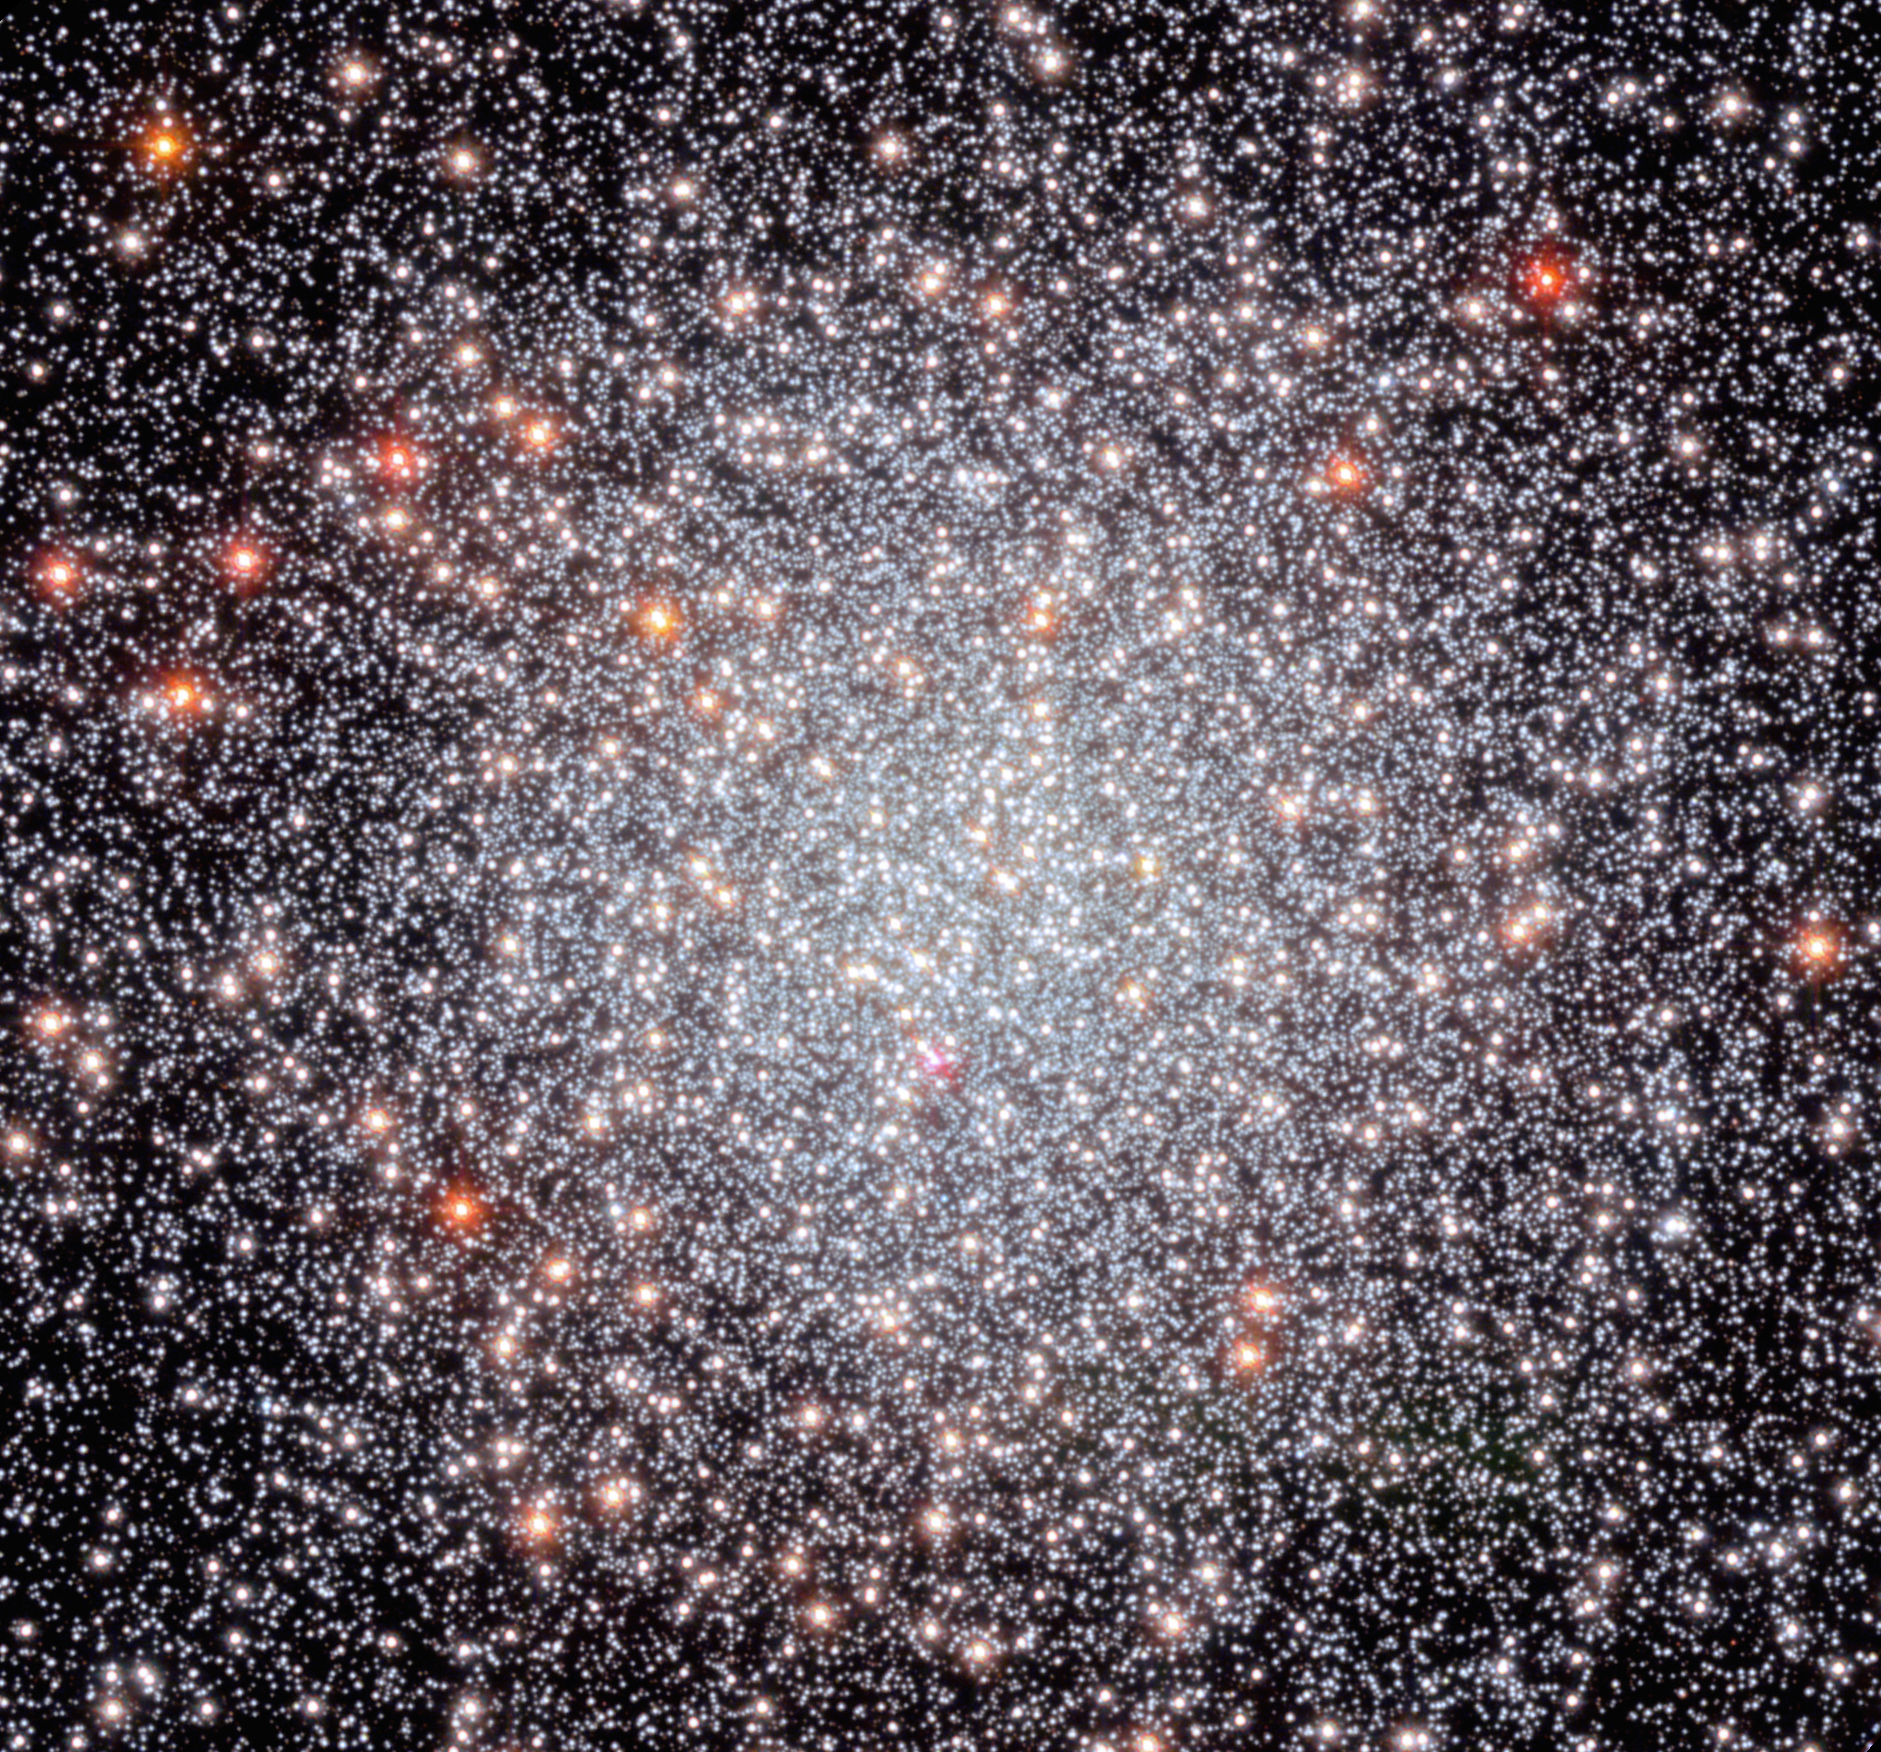

Hubble’s view of NGC 6440

The stars of globular cluster NGC 6440 shine brightly in this 2022 NASA/ESA Hubble Space Telescope image.

Globular clusters like NGC 6440 are roughly spherical, tightly packed, collections of old stars bound together by gravity. They can be found throughout galaxies, but often live on the outskirts. They hold hundreds of thousands to millions of stars that are on average about one light-year apart, but they can be as close together as the size of our Solar System.

The data used to create this image came from five different Hubble observing programmes, four of which focused on the properties of pulsars. A pulsar is a highly magnetised, rotating neutron star that emits a beam of electromagnetic radiation from its magnetic poles. To us, that beam appears as a short burst or pulse as the star rotates. Pulsars spin extremely fast. Astronomers have clocked the fastest pulsars at more than 716 rotations per second, but a pulsar could theoretically rotate as fast as 1500 rotations per second before slowly losing energy or breaking apart.

Credit: NASA, ESA, C. Pallanca and F. Ferraro (Universita Di Bologna), and M. van Kerkwijk (University of Toronto); Processing: G. Kober (NASA/Catholic University of America)